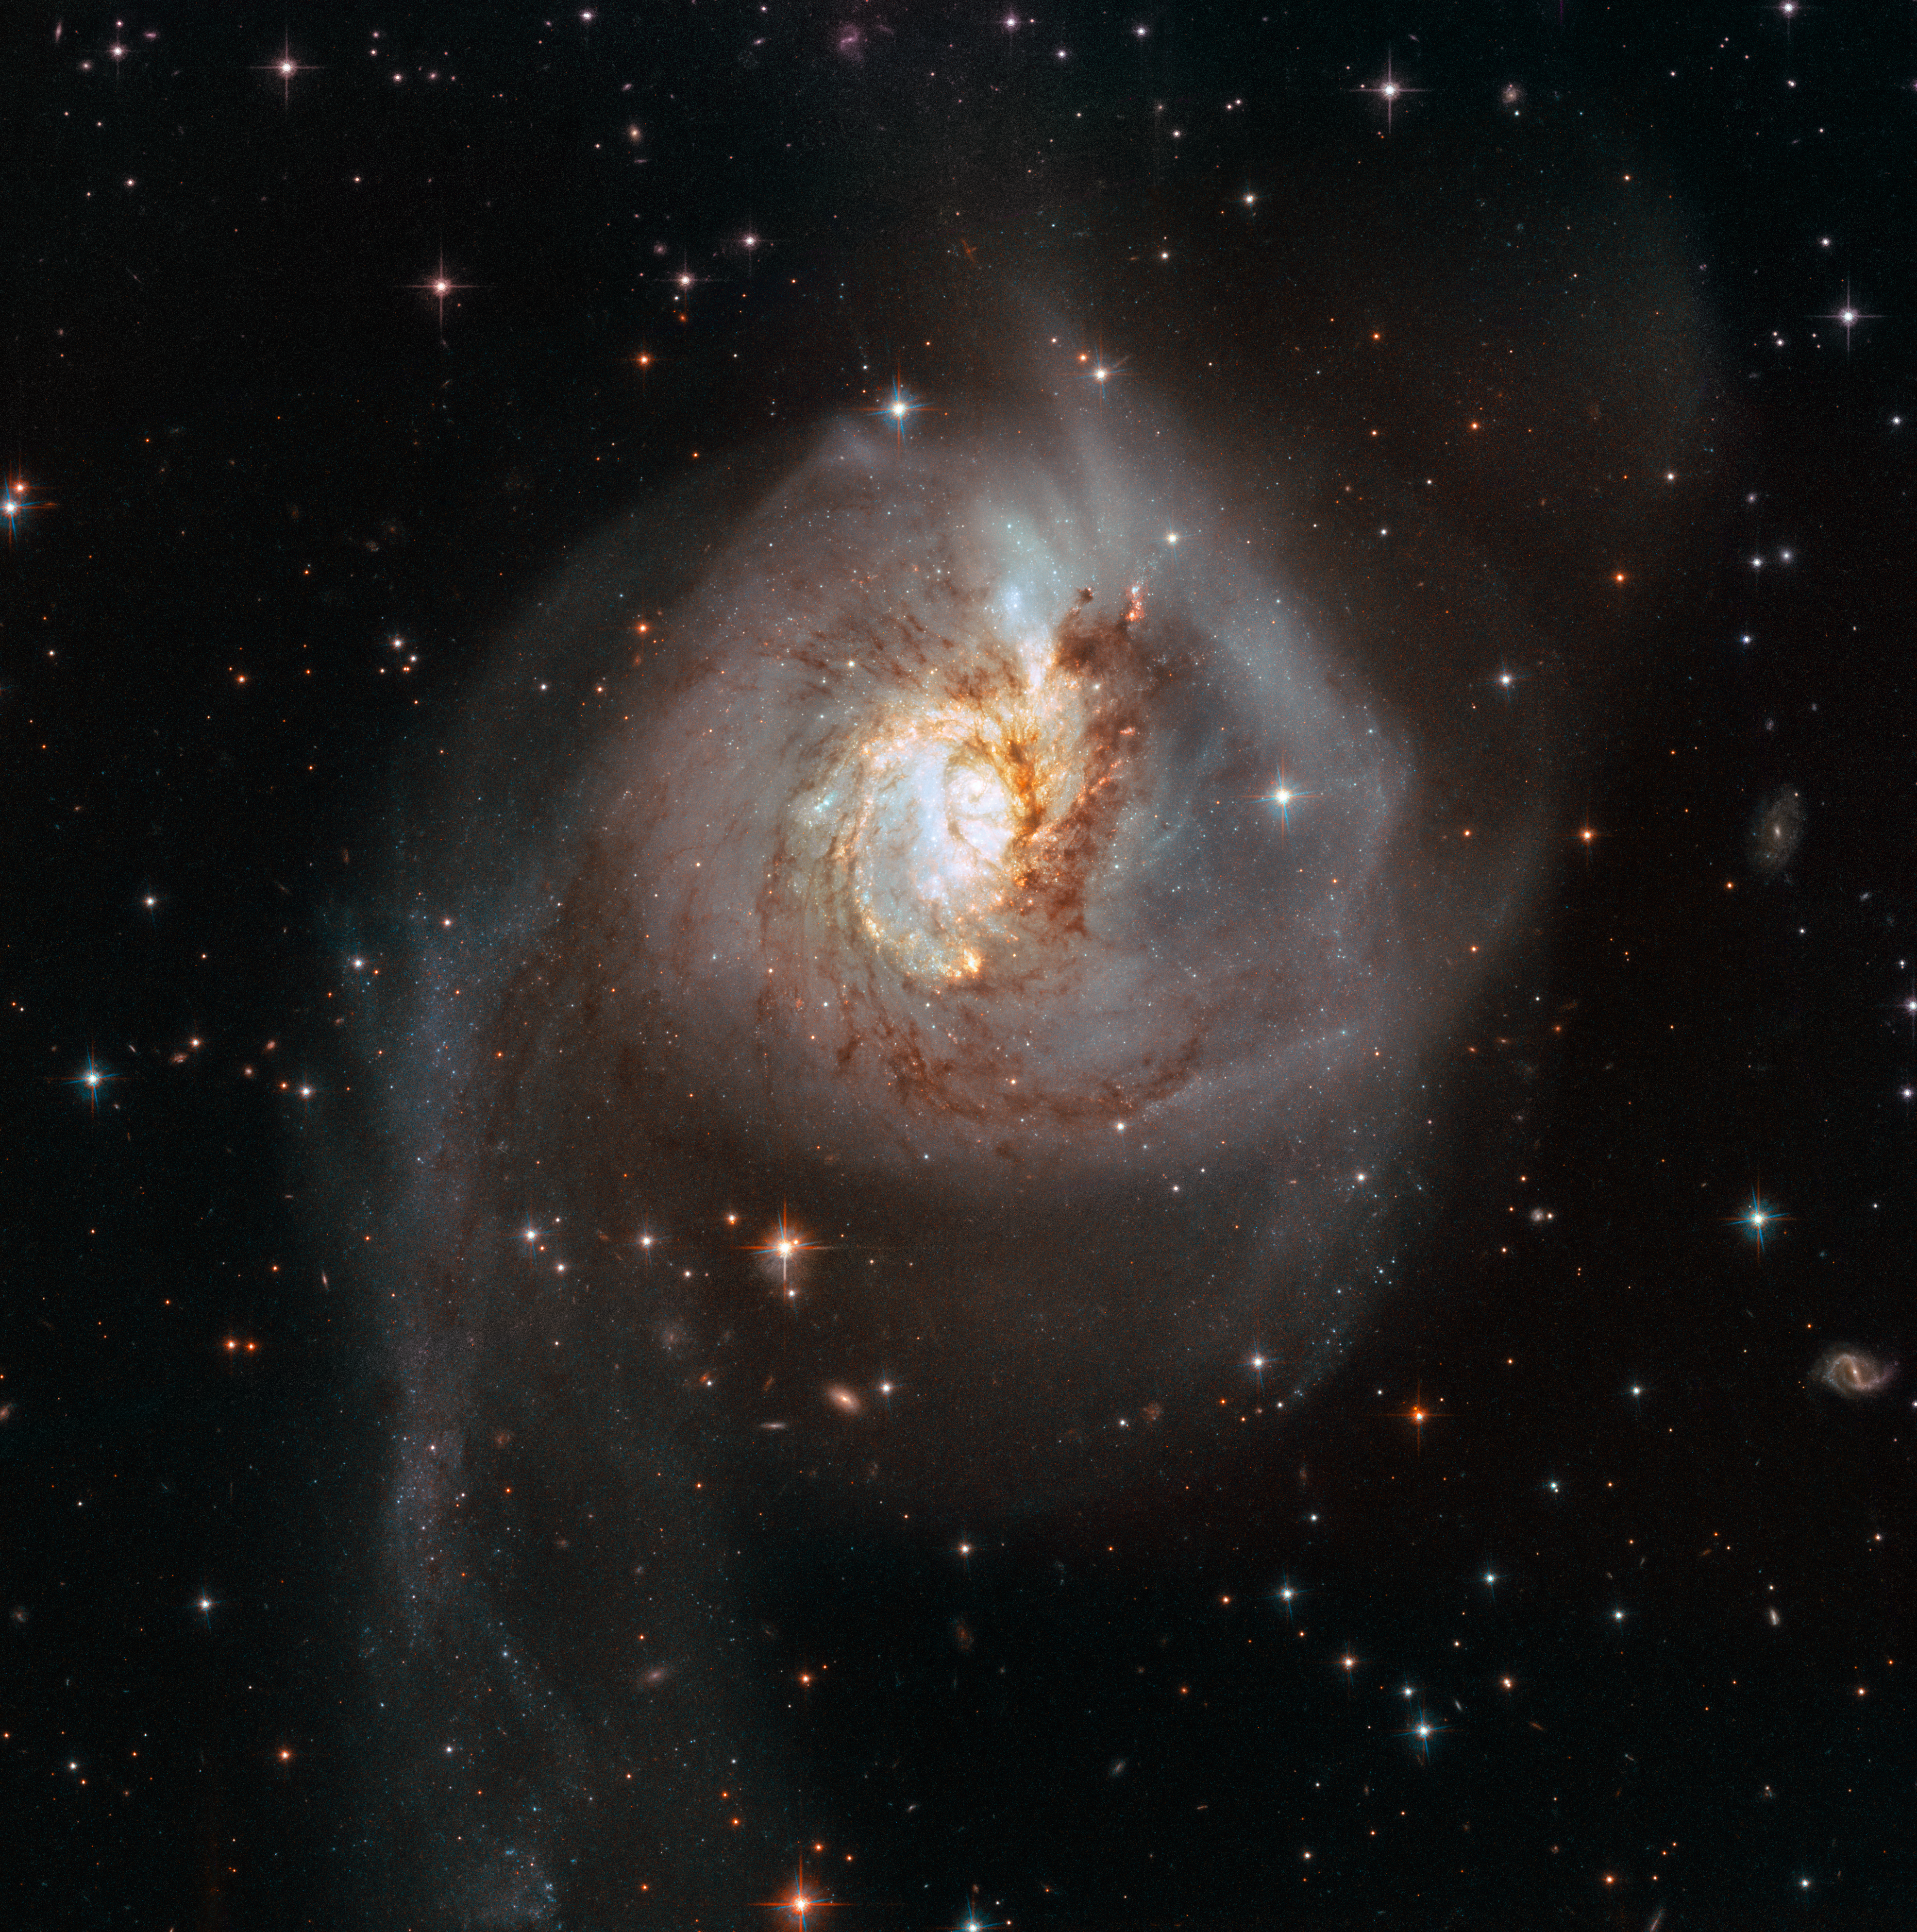

Peculiar galaxy NGC 3256

This image, taken with the Wide Field Camera 3 (WFC3) and the Advanced Camera for Surveys (ACS), both installed on the NASA/ESA Hubble Space Telescope, shows the peculiar galaxy NGC 3256. The galaxy is about 100 million light-years from Earth and is the result of a past galactic merger, which created its distorted appearance. As such, NGC 3256 provides an ideal target to investigate starbursts that have been triggered by galaxy mergers.

Another image of NGC 3256 was already released in 2008, as part of a collection of interacting galaxies, created for Hubble’s 18th birthday.

Credit: ESA/Hubble, NASA